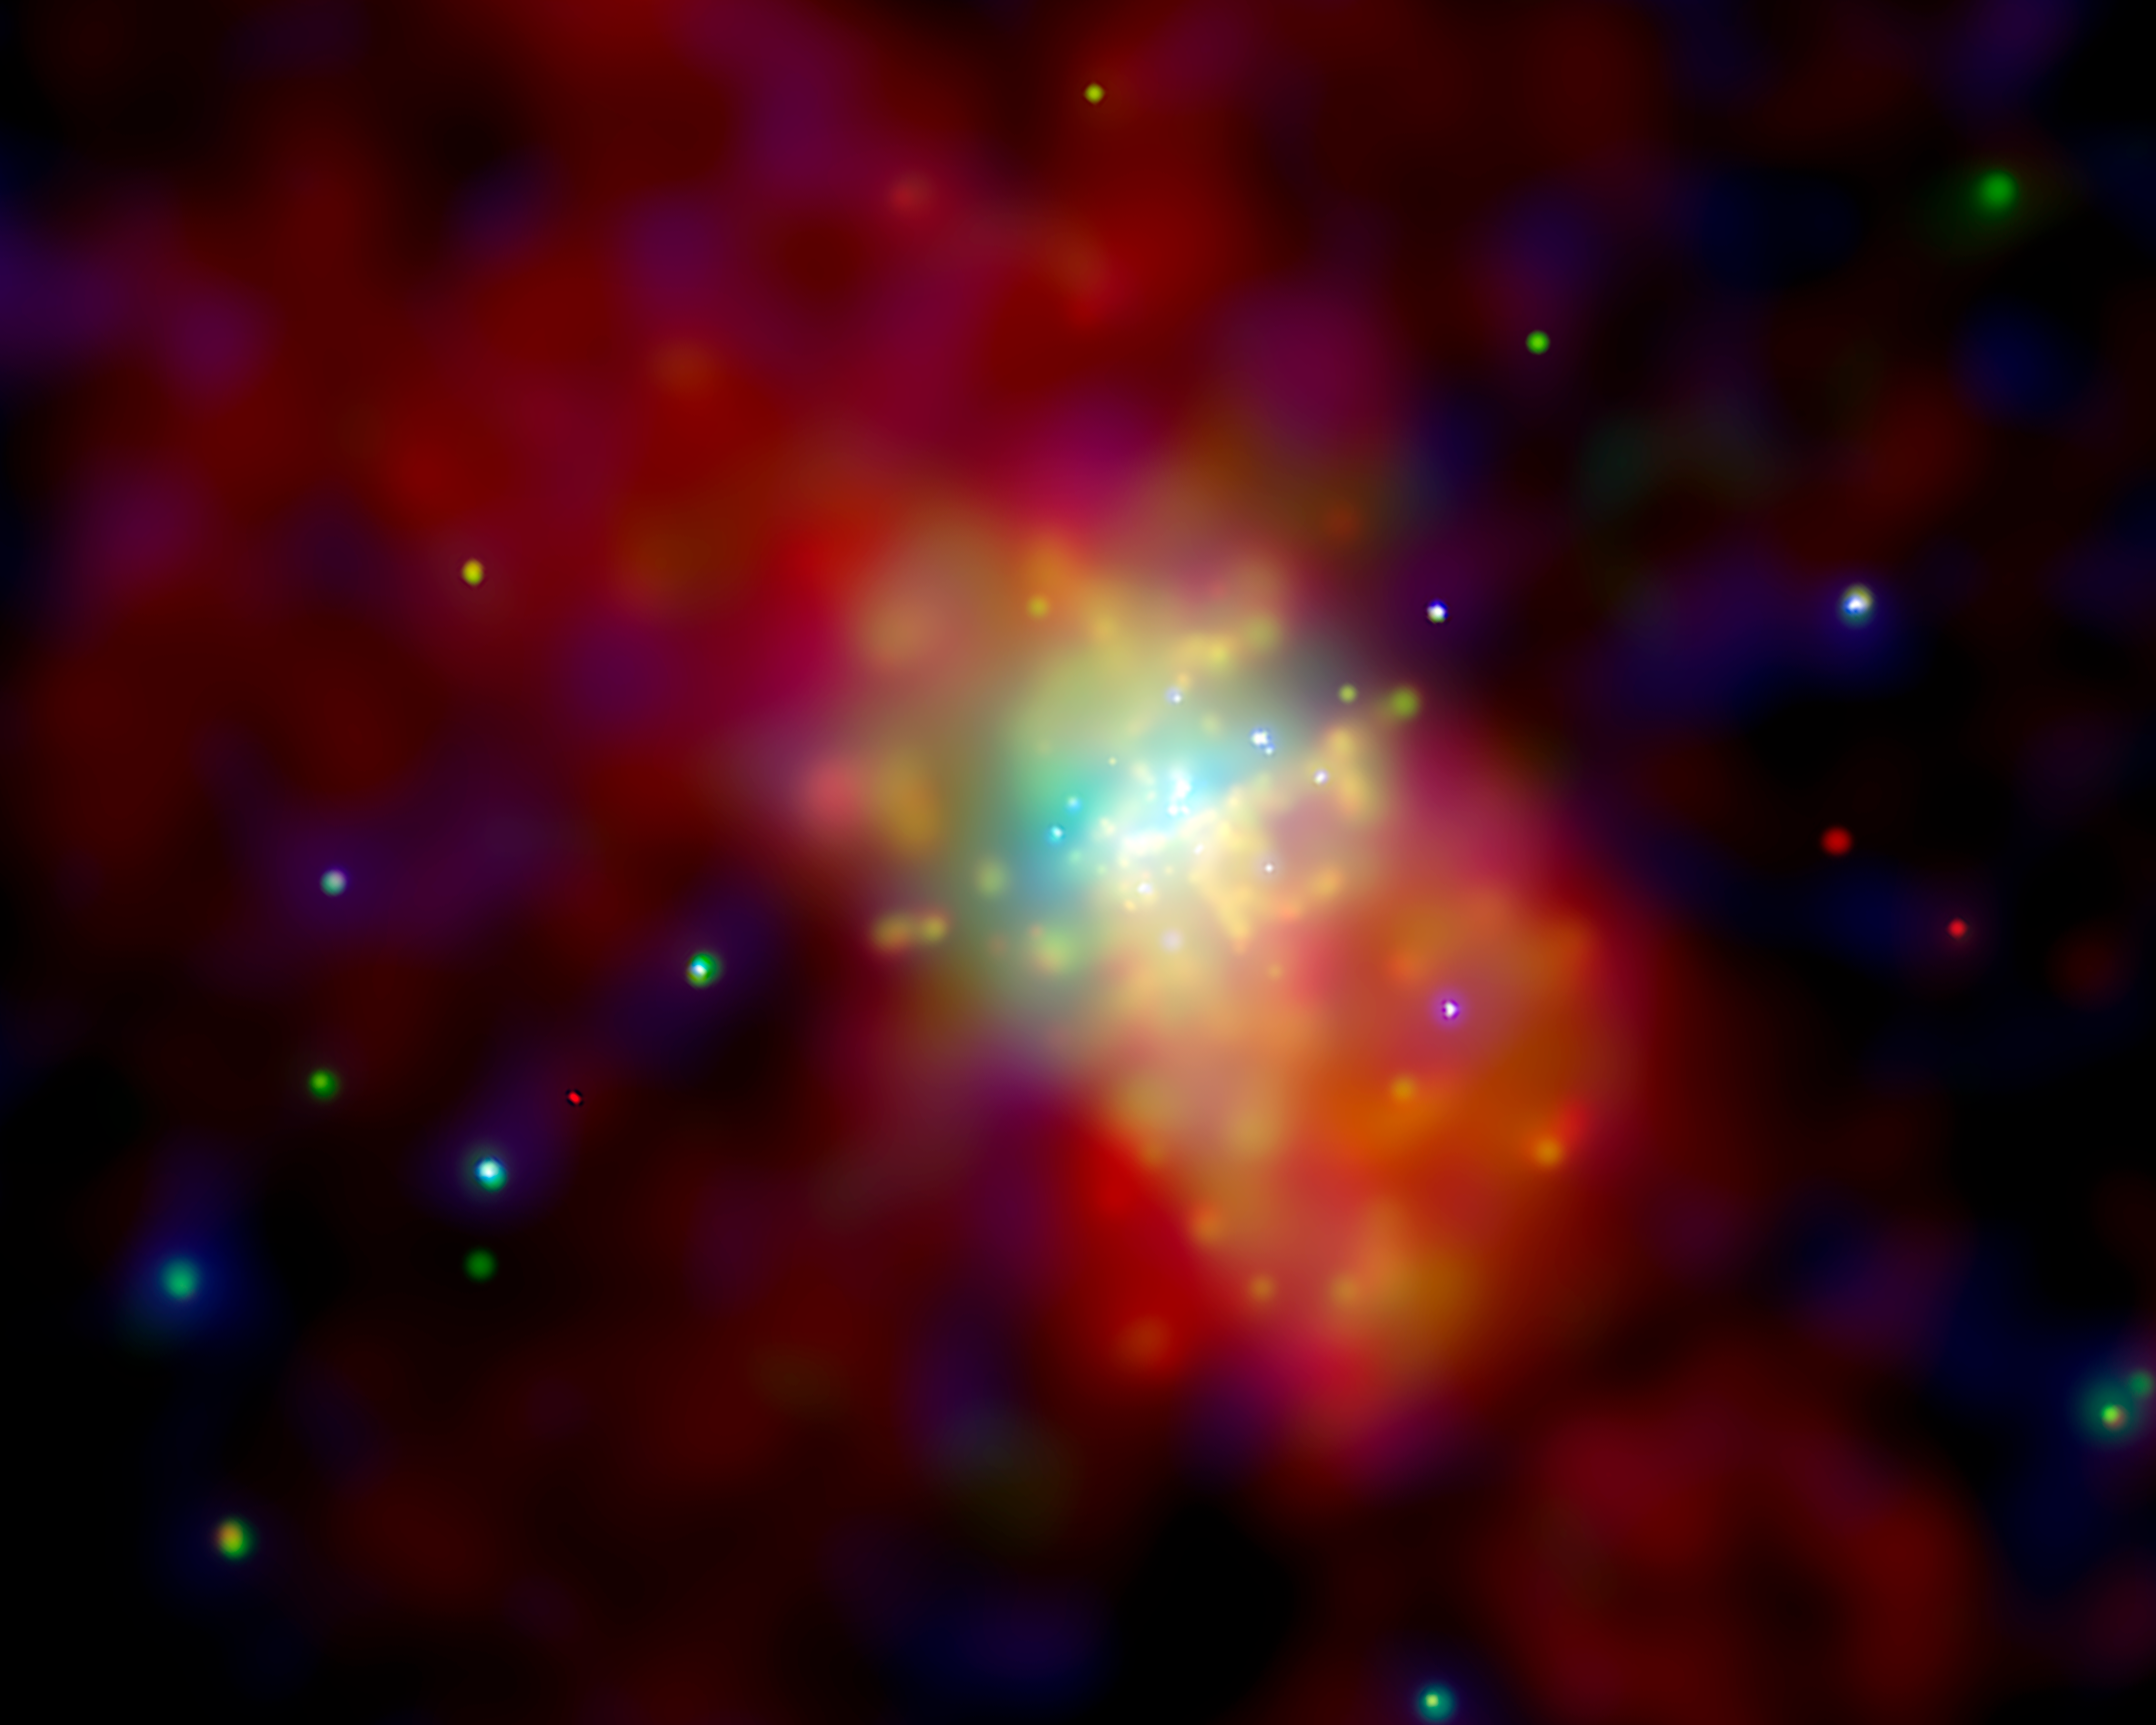

Chandra image of Messier 82

Composite image of the active galaxy Messier 82 from x-ray observations by Chandra X-Ray Observatory in three energy bands coded in red (lowest energy x-ray photons), green and blue (highest energy).

Credit: NASA/CXC/JHU/D.Strickland